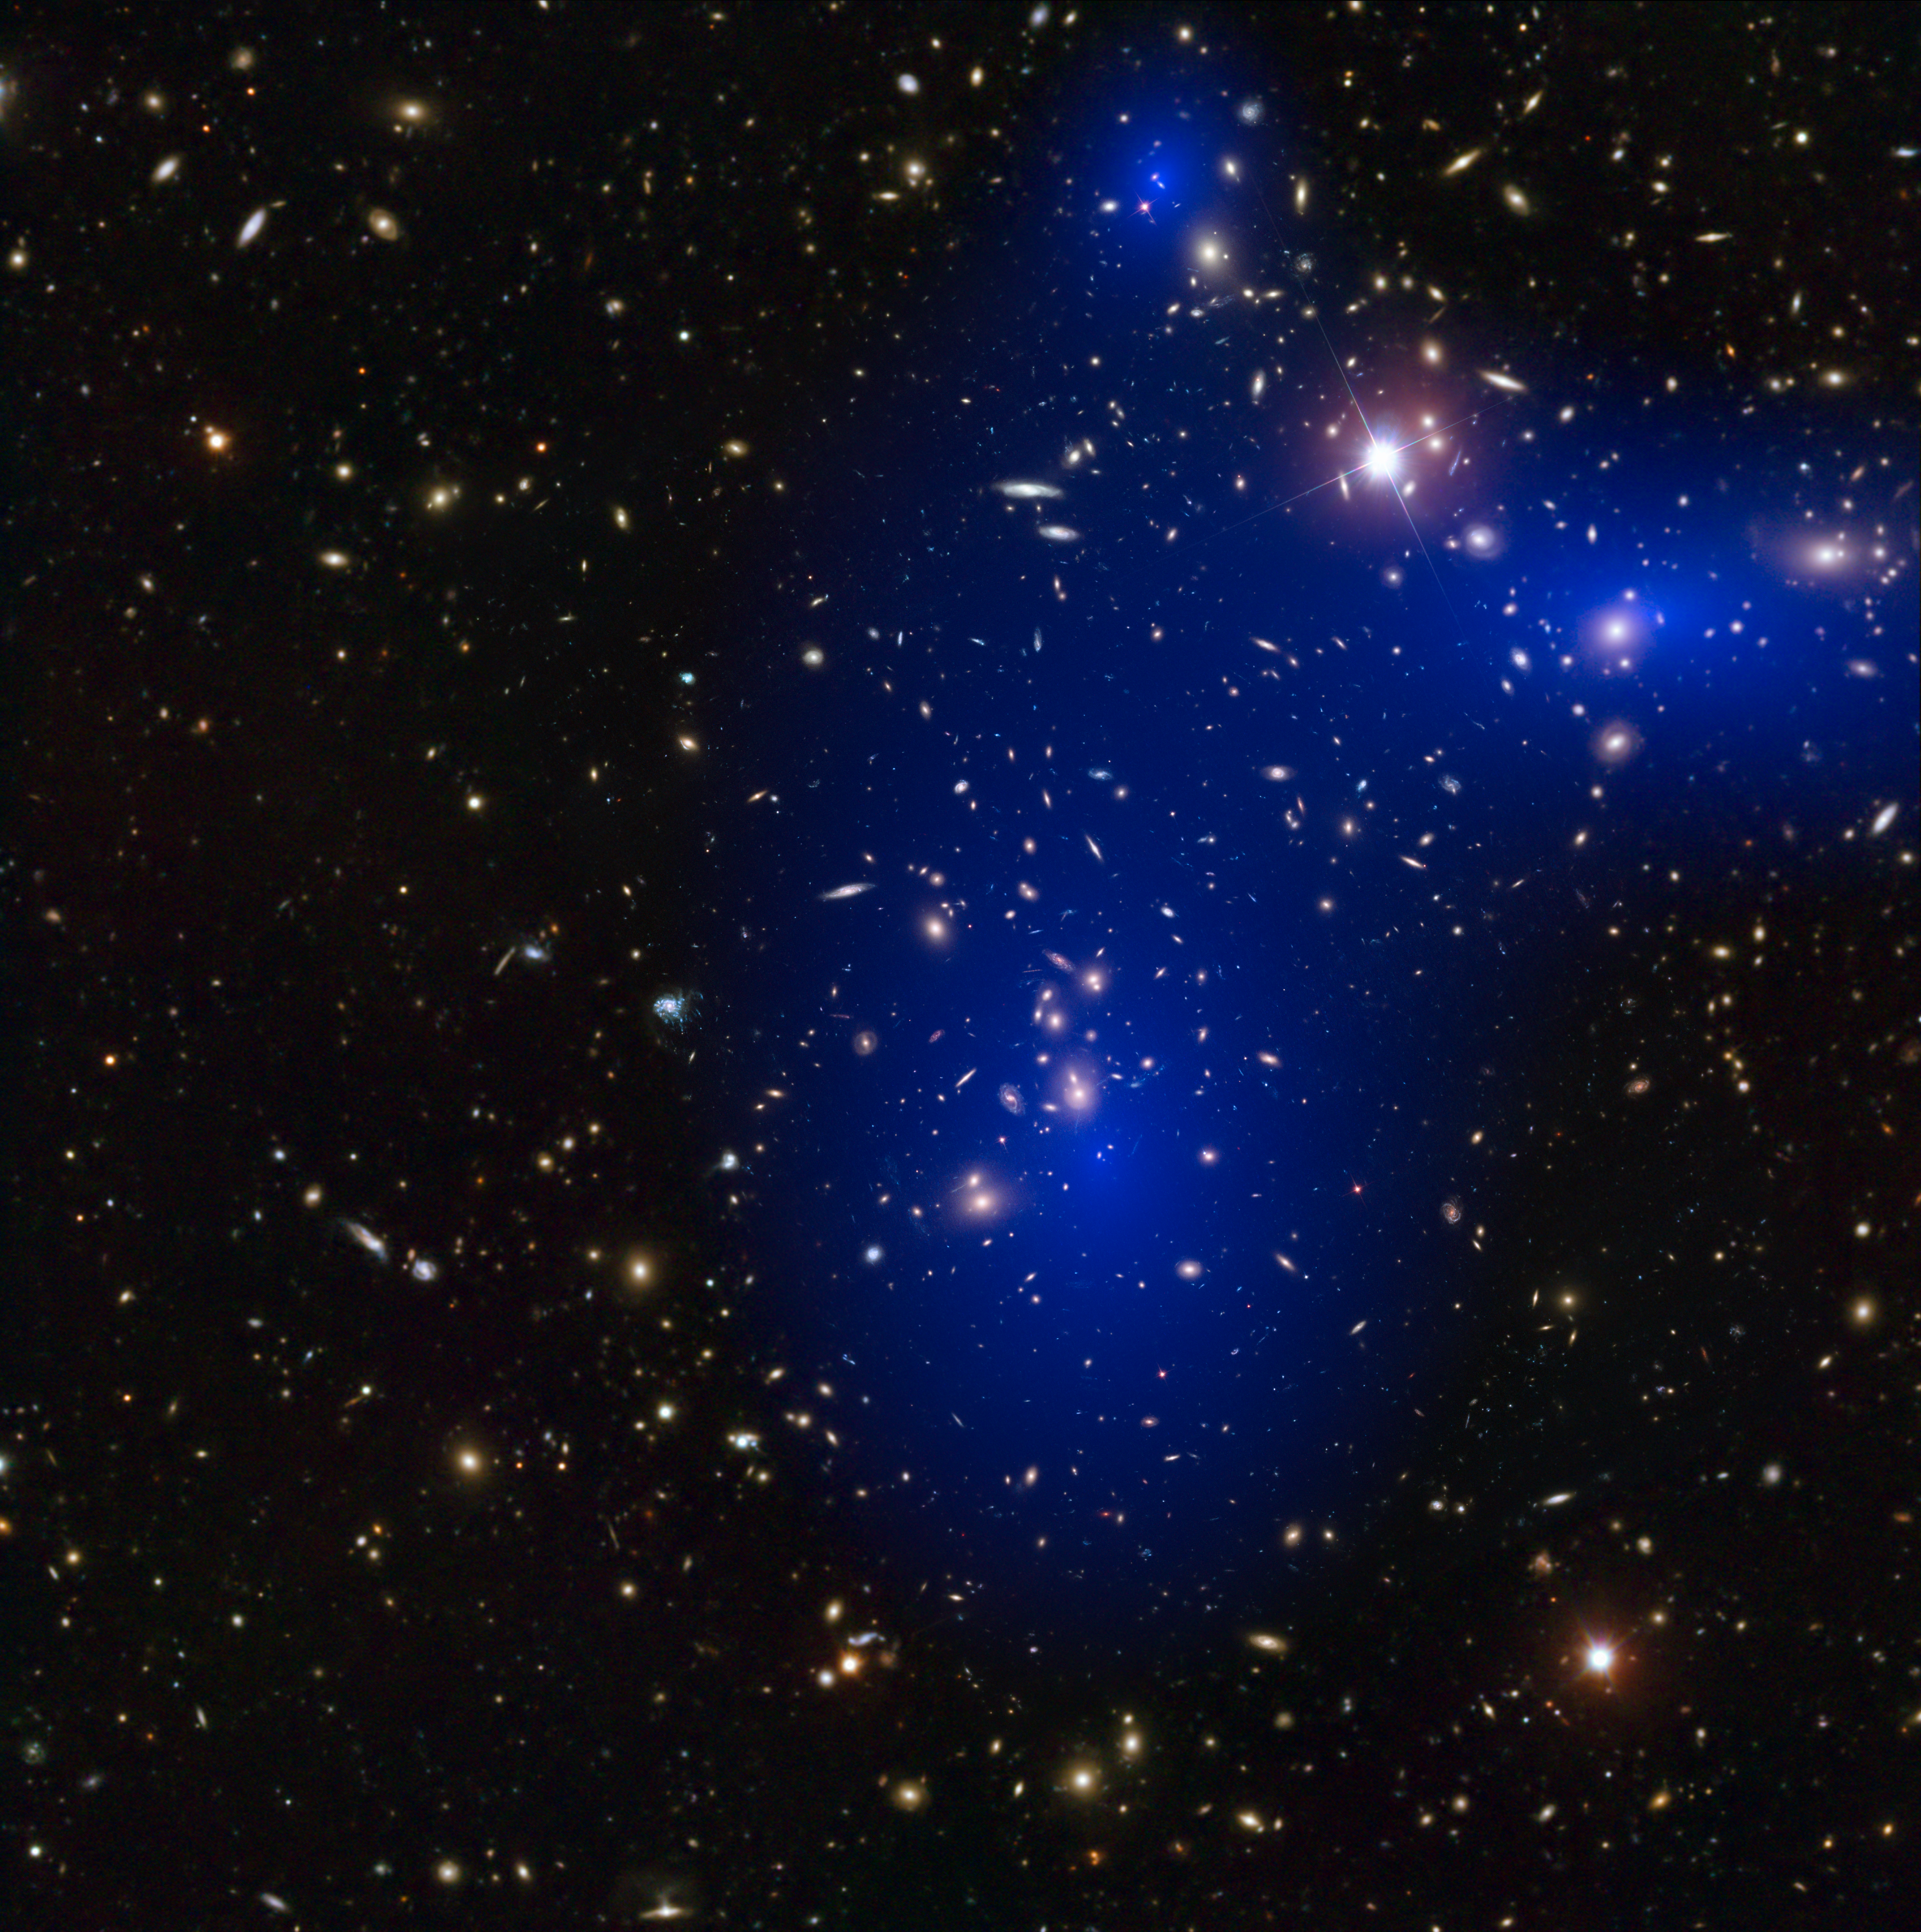

Galaxy cluster Abell 2744 with dark matter map

This is a NASA/ESA Hubble Space Telescope image of the galaxy cluster Abell 2744. Shown in blue on the image is a map of the dark matter found within the cluster. This cluster was part of a study of 72 galaxy cluster collisions which determined that dark matter interacts with other dark matter even less than previously thought.

Credit: NASA, ESA, D. Harvey (École Polytechnique Fédérale de Lausanne, Switzerland), R. Massey (Durham University, UK), ESO and D. Coe (STScI), J. Merten (Heidelberg/Bologna)